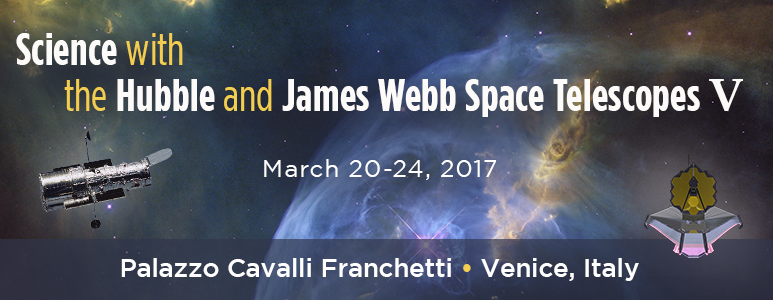

Science with Hubble and the James Webb Space Telescopes — V

Banner for the conference “Science with the Hubble and James Webb Space Telescope — V”, taking place in March 2017 in the Palazzo Cavalli Franchetti in Venice, Italy.

Credit: NASA/ESA, P. Jeffris